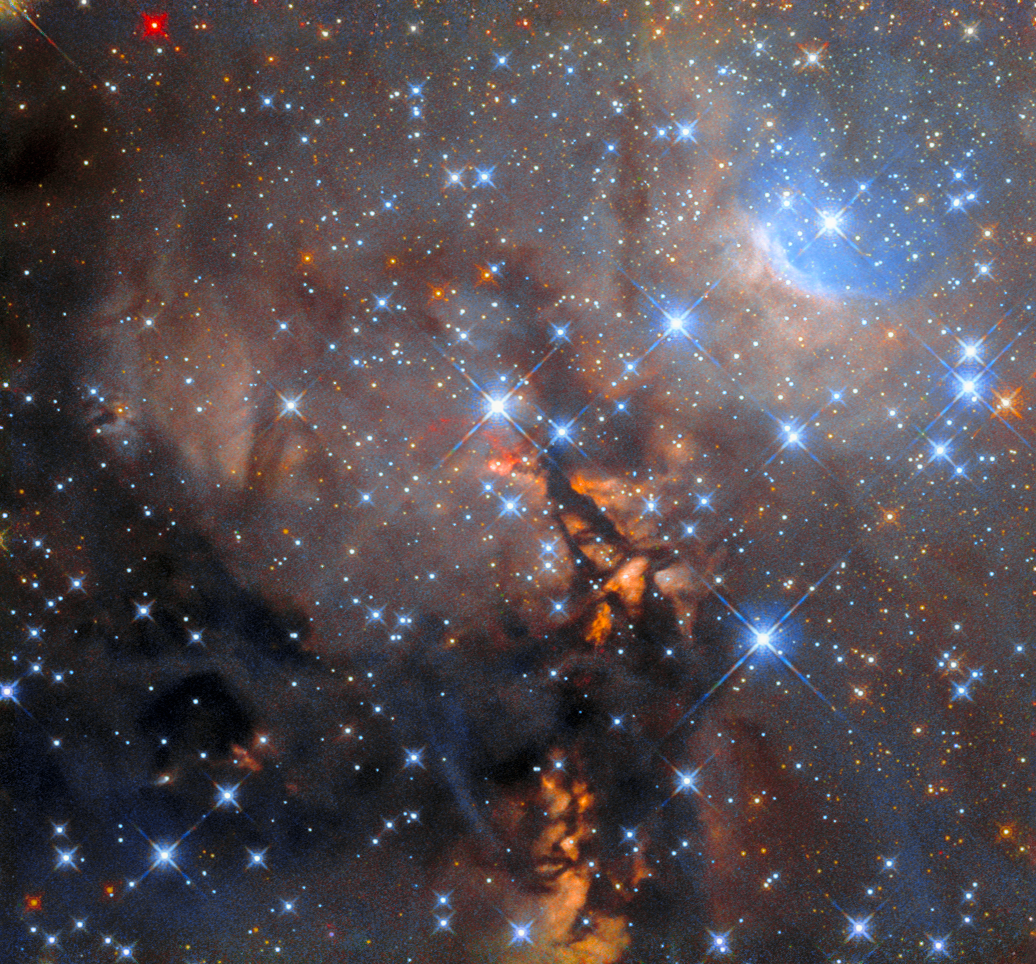

Stellar cradle

The protostellar object OH 339.88-1.26, which lies 8 900 light-years from Earth in the constellation Ara, lurks in this dust-filled image from the NASA/ESA Hubble Space Telescope. Winding lanes of dark dust thread through this image, which is also studded with bright stars crowned with criss-crossing diffraction spikes.

The dark vertical streak at the centre of this image hides OH 339.88-1.26, which is an astrophysical maser. A maser — which is an acronym for “microwave amplification by stimulated emission of radiation” — is essentially a laser that produces coherent light at microwave wavelengths. Such objects can occur naturally in astrophysical situations, in environments ranging from the north pole of Jupiter to star-forming regions such as the one pictured here.

This image comes from a set of Hubble observations that peer into the hearts of regions where massive stars are born to constrain the nature of massive protostars and test theories of their formation. Astronomers turned to Hubble’s Wide Field Camera 3 to explore the massive protostar G339.88-1.26, which is estimated to be about 20 times the mass of the Sun and is lurking in the dusty clouds in the center of the image. The Hubble observations were supported by other state-of-the-art observatories including ALMA, the Atacama Large Millimeter/submillimeter Array. ALMA is composed of 66 moveable high-precision antennas which can be arranged over distances of up to 16 kilometres on a plateau perched high in the Chilean Andes. Further data were contributed by the Stratospheric Observatory For Infrared Astronomy (SOFIA), which is a telescope that — until recently — operated out of a converted 747 aircraft.

Credit: ESA/Hubble & NASA, J. C. Tan (Chalmers Univ. & Univ. of Virginia)